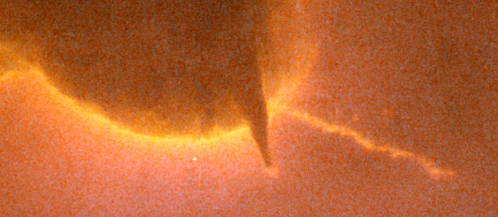

Closeup of Jet in Trifid Nebula

Three huge intersecting dark lanes of interstellar dust make the Trifid Nebula one of the most recognizable and striking star birth regions in the night sky.

Credit: NASA, ESA, and The Hubble Heritage Team (AURA/STScI)